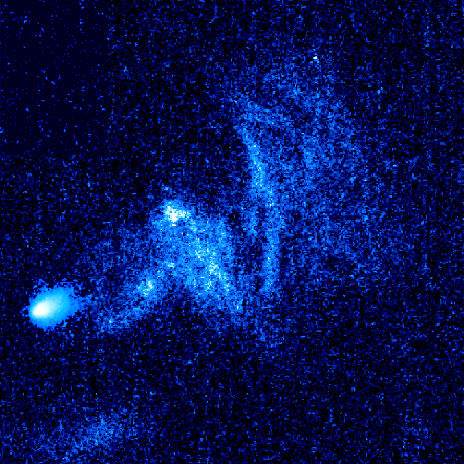

Hubble image of stellar bow shock (1 of 4)

Resembling a comet streaking across the sky this speedy star is plowing through a region of dense interstellar gas and creating a brilliant arrowhead structure and a trailing tail of glowing gas. The star is one of 14 young runaway stars spotted by the Advanced Camera for Surveys between October 2005 and July 2006.

Credit: NASA, ESA and R. Sahai (NASA's Jet Propulsion Laboratory)